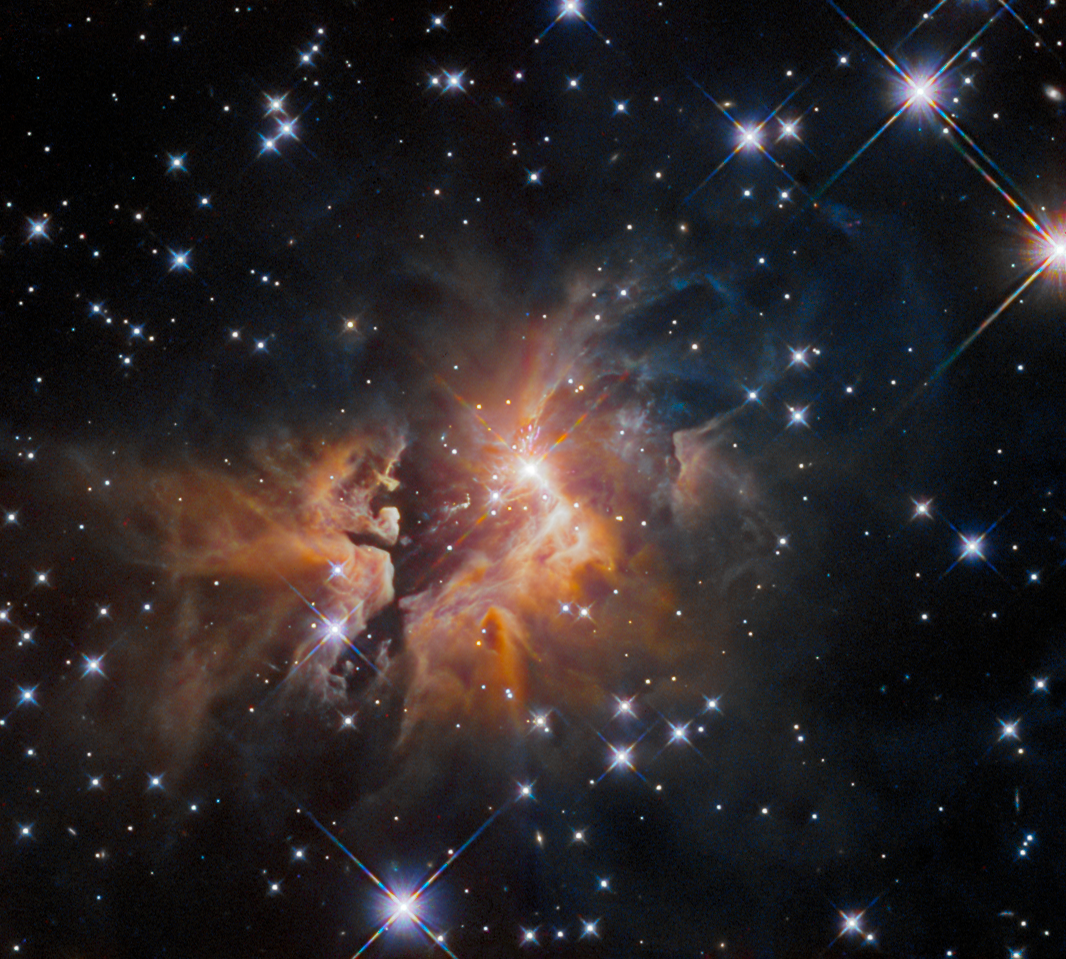

An Enigmatic Astronomical Explosion

A bright young star is surrounded by a shroud of thick gas and dust in this image from the NASA/ESA Hubble Space Telescope. Hubble’s Wide Field Camera 3 inspected a young stellar object, over 9000 light years away in the constellation Taurus, to help astronomers understand the earliest stages in the lives of massive stars. This object — which is known to astronomers as IRAS 05506+2414 — is thought to be an example of an explosive event caused by the disruption of a massive young star system. If so, it would only be the second such example known.

Usually the swirling discs of material surrounding a young star are funnelled into twin outflows of gas and dust from the star. In the case of IRAS 05506+2414, however, a fan-like spray of material travelling at velocities of up to 350 kilometres per second is spreading outwards from the centre of this image.

Astronomers turned to Hubble’s Wide Field Camera 3 to measure the distance to IRAS 05506+2414. While it is possible to measure the velocity of material speeding outwards from the star, astronomers cannot tell how far from Earth the star actually is from a single observation. However, by measuring the distance that the outflow travels between successive images, they will be able to infer the distance to IRAS 05506+2414. This will allow astronomers to determine how bright the star is and how much energy it is emitting, and hence to estimate its mass — all vital information that will help to understand the origin of this bright young star’s unusual outflow.

Credit: ESA/Hubble & NASA, R. Sahai